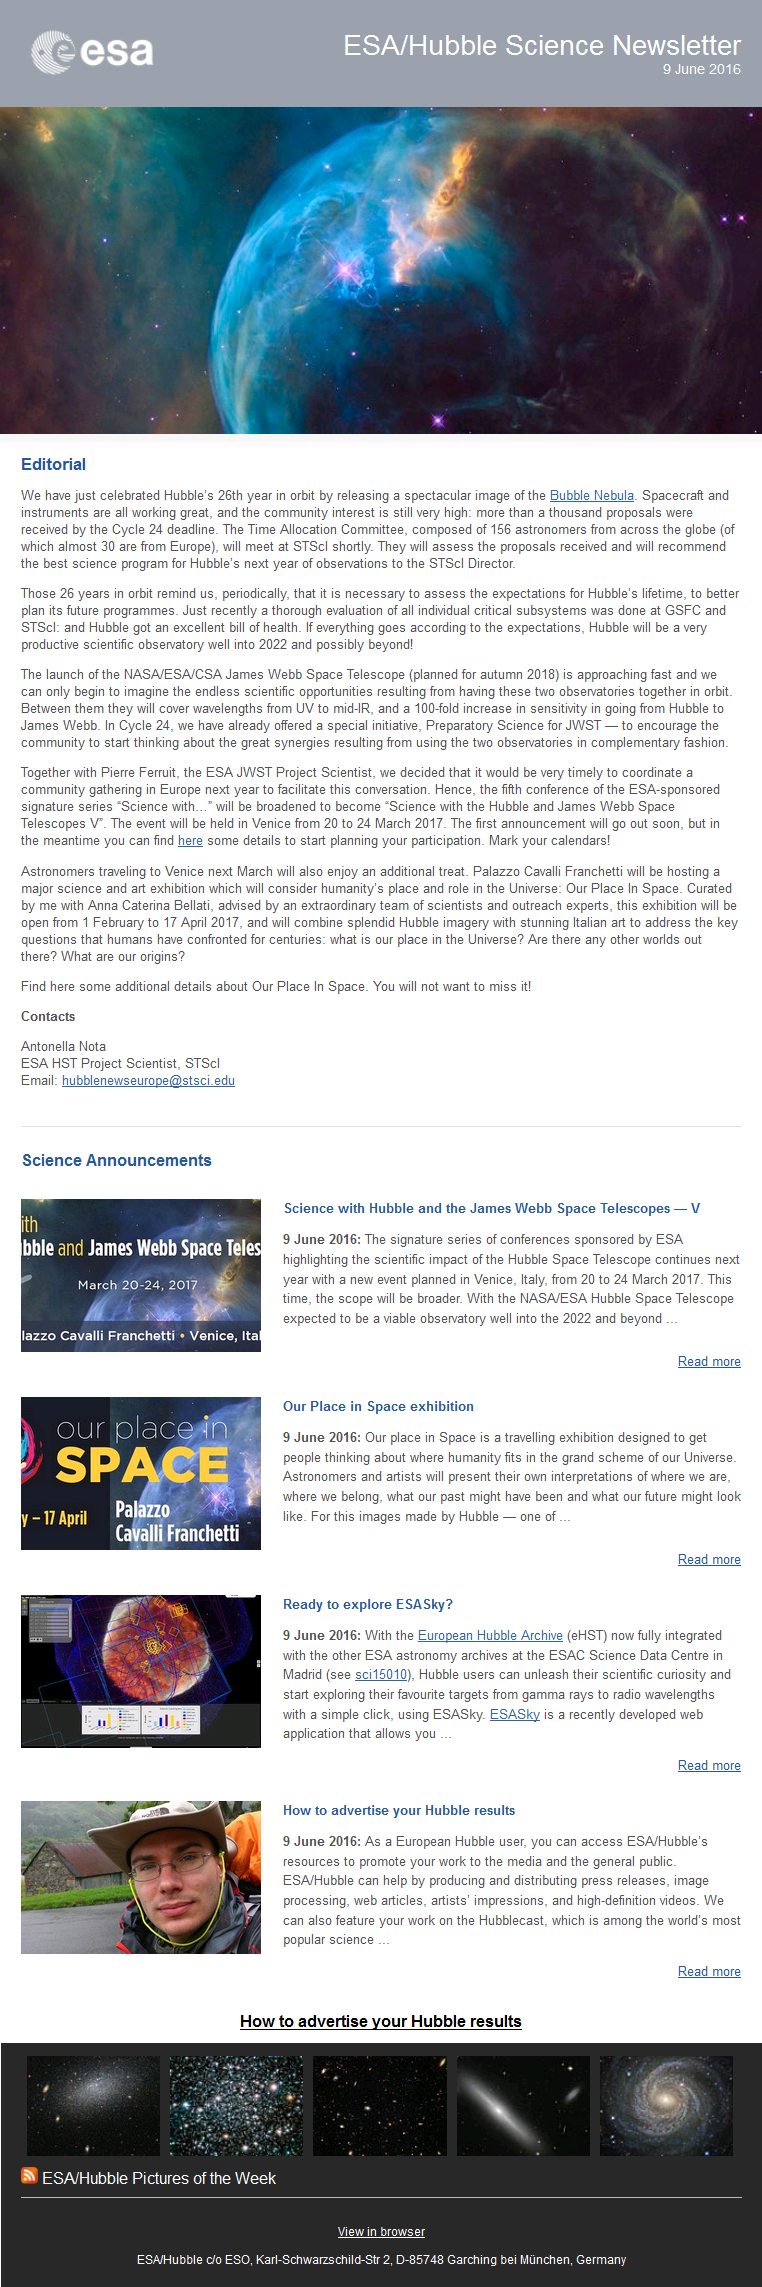

Screenshot of the June issue of ESA/Hubble Science Newsletter

Screenshot of the June issue of ESA/Hubble Science Newsletter.

Credit: NASA & ESA